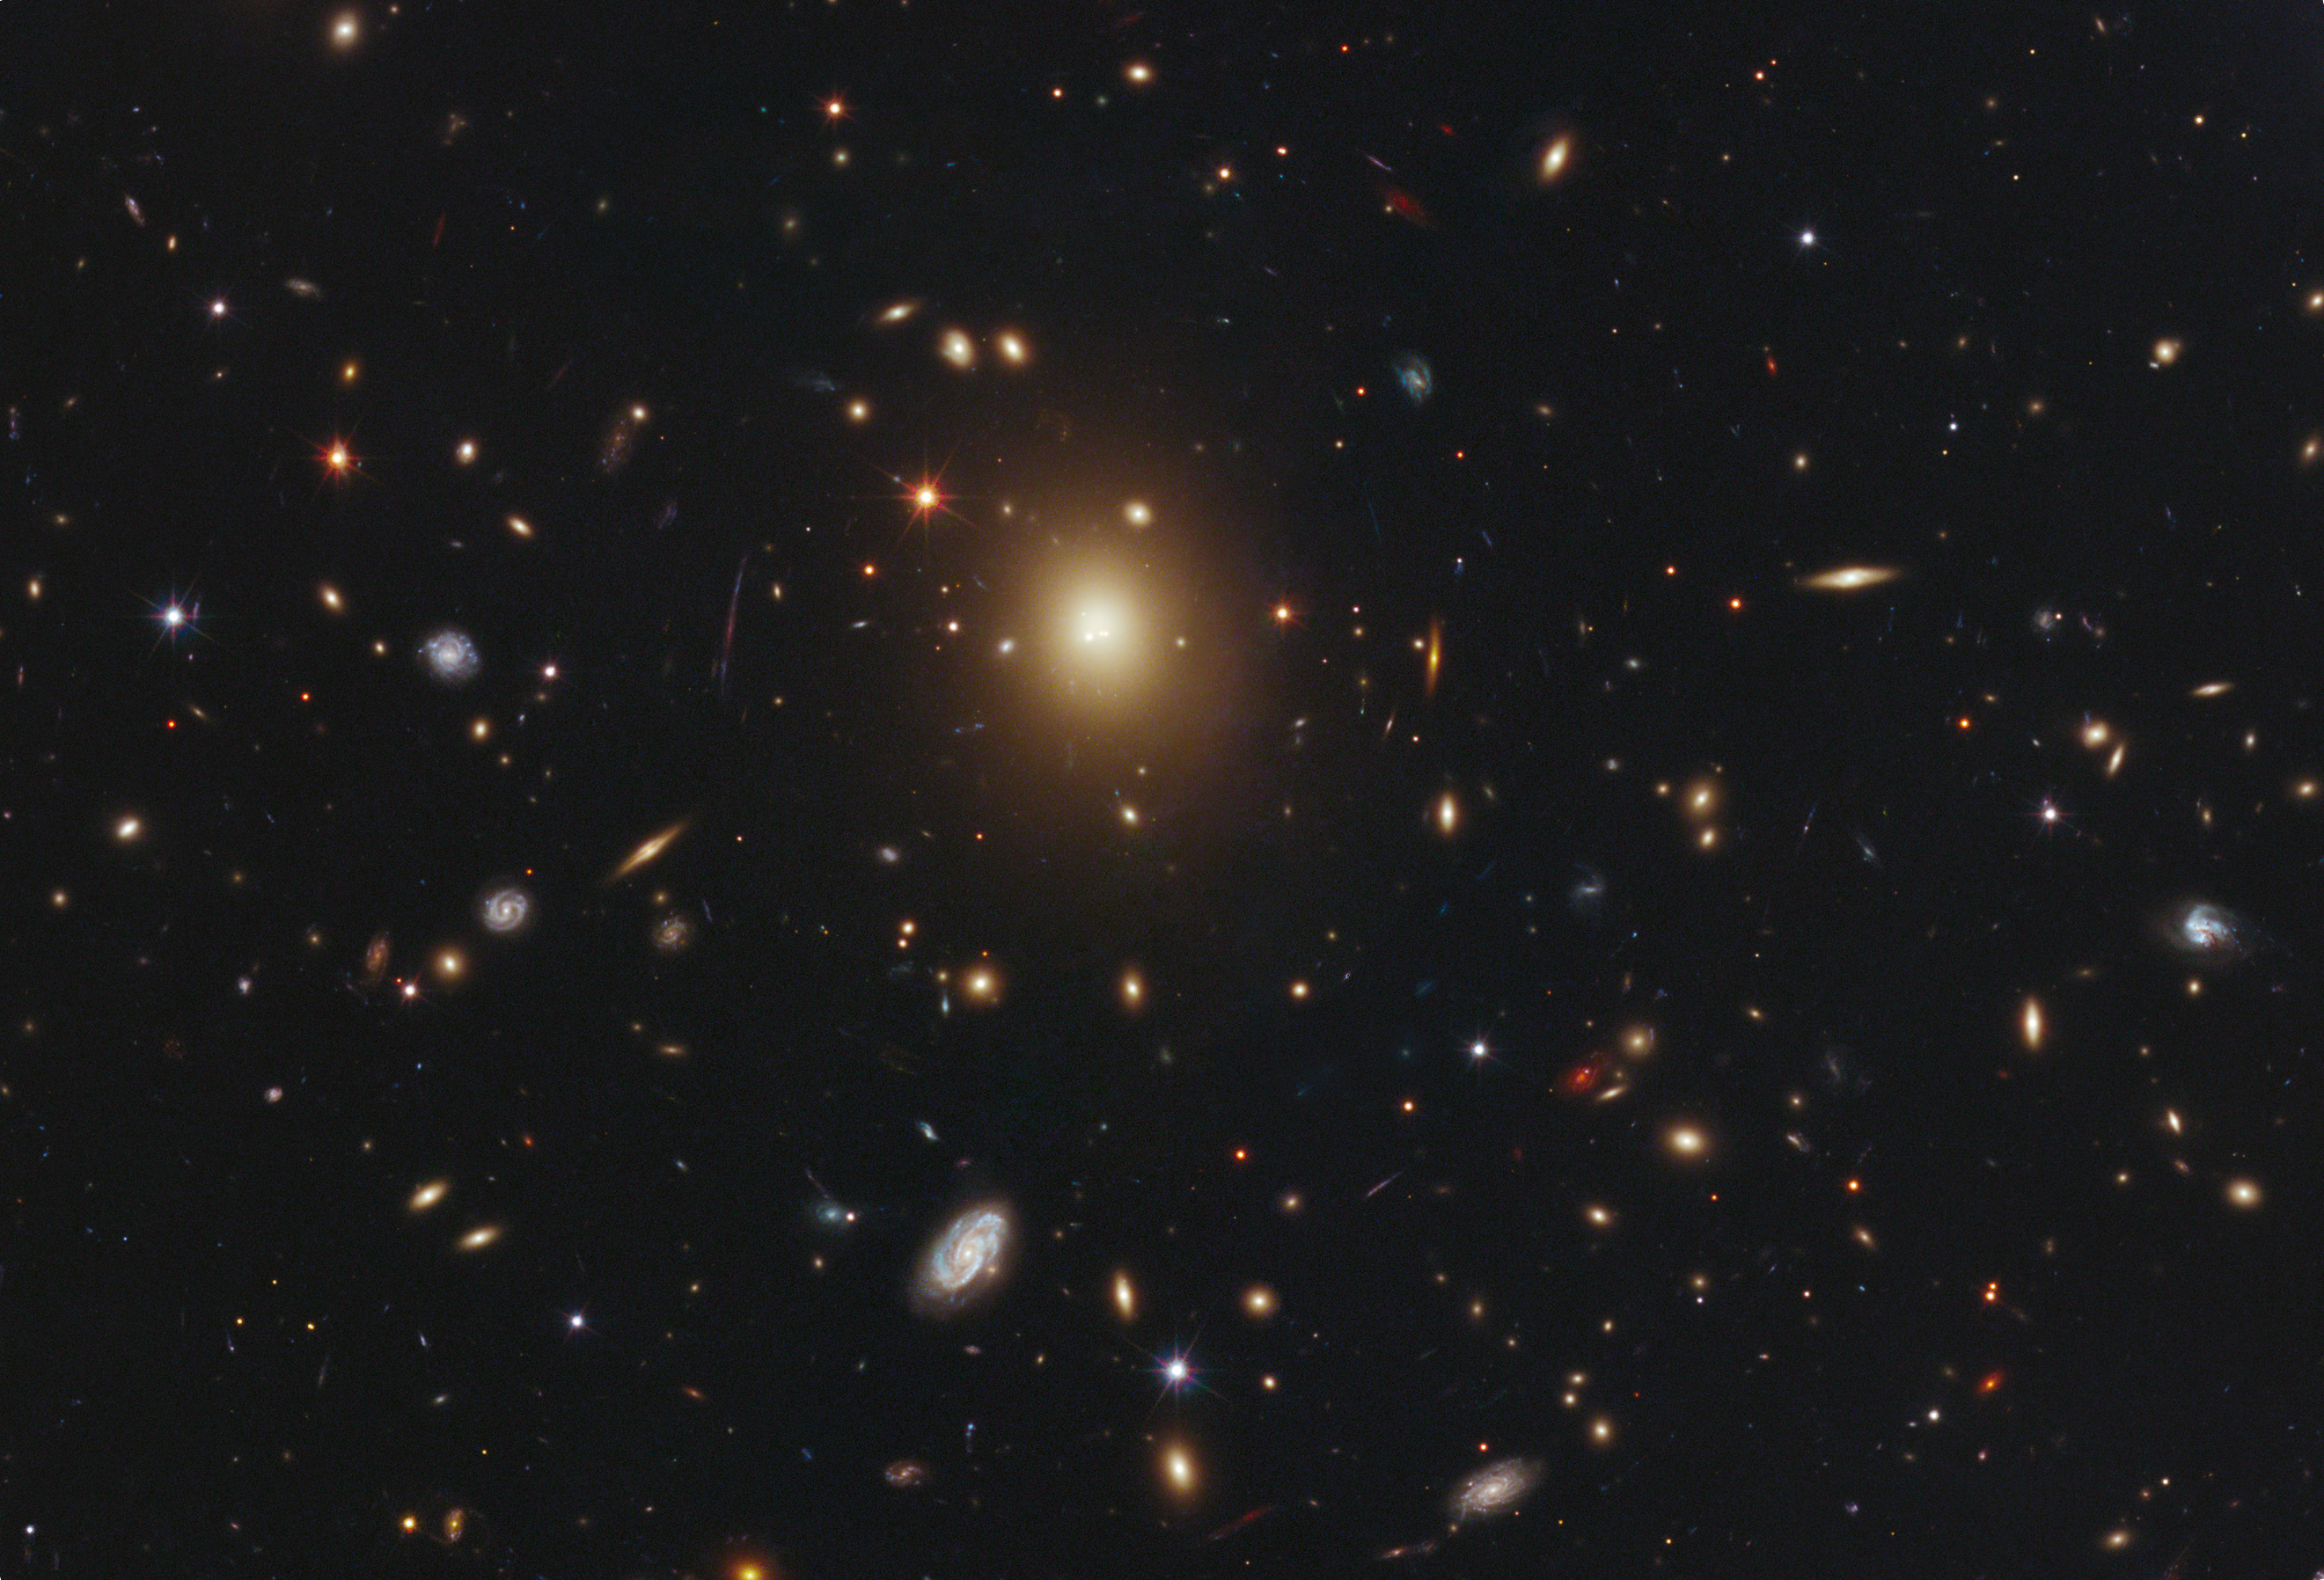

Brightest galaxy in Abell 2261

The giant elliptical galaxy in the centre of this image, taken by the NASA/ESA Hubble Space Telescope, is the most massive and brightest member of the galaxy cluster Abell 2261. Astronomers refer to it as the brightest cluster galaxy (BCG). Spanning a little over one million light-years, the galaxy is about 20 times the diameter of our Milky Way galaxy.

Astronomers used Hubble's Advanced Camera for Surveys and Wide Field Camera 3 to measure the amount of starlight across the galaxy, catalogued as 2MASX J17222717+3207571 but more commonly called A2261-BCG (short for Abell 2261 brightest cluster galaxy). Abell 2261 is located three billion light-years away.

The observations were taken between March and May 2011. The Abell 2261 cluster is part of a multi-wavelength survey called the Cluster Lensing And Supernova survey with Hubble (CLASH).

Credit: NASA, ESA, M. Postman (Space Telescope Science Institute, USA), T. Lauer (National Optical Astronomy Observatory, USA), and the CLASH team.